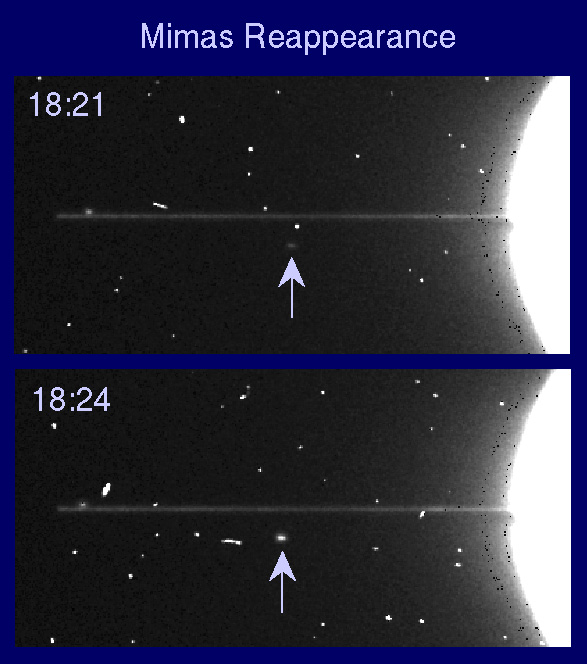

Reappearance of Saturn's satellite Mimas

On 10 August 1995 HST observed the second passage of the Earth through Saturn's ring plane in the 1995/96 series of triple crossings. This pair of 100 sec exposures was taken with the Wide Field and Planetary Camera (WFPC2) in planetary (high resolution) mode 2.5 hours prior to the Earth's passage through the ring plane. An 8922 A methane bandfilter was used to reduce the scattered light from the planet.

The rings appear as a razor-thin line extending from the planet's eastern limb out to the usually faint F Ring, at a radius of 140,000km. Unlike ground-based images taken a few days earlier, the rings show no sign of clumps or bright spots at this time. The brightness of the rings in this view implies an effective 'thickness' of about 1.5 km, although the actual ring thickness is much less than this - probably as little as 10 meters. The edge-on brightness of the rings is due to a combination of vertical waves in the rings, the F Ring, and perhaps other unidentified sources.

Credit: Phil Nicholson (Cornell University), Mark Showalter (NASA/ESA-Ames/Stanford) and NASA/ESA